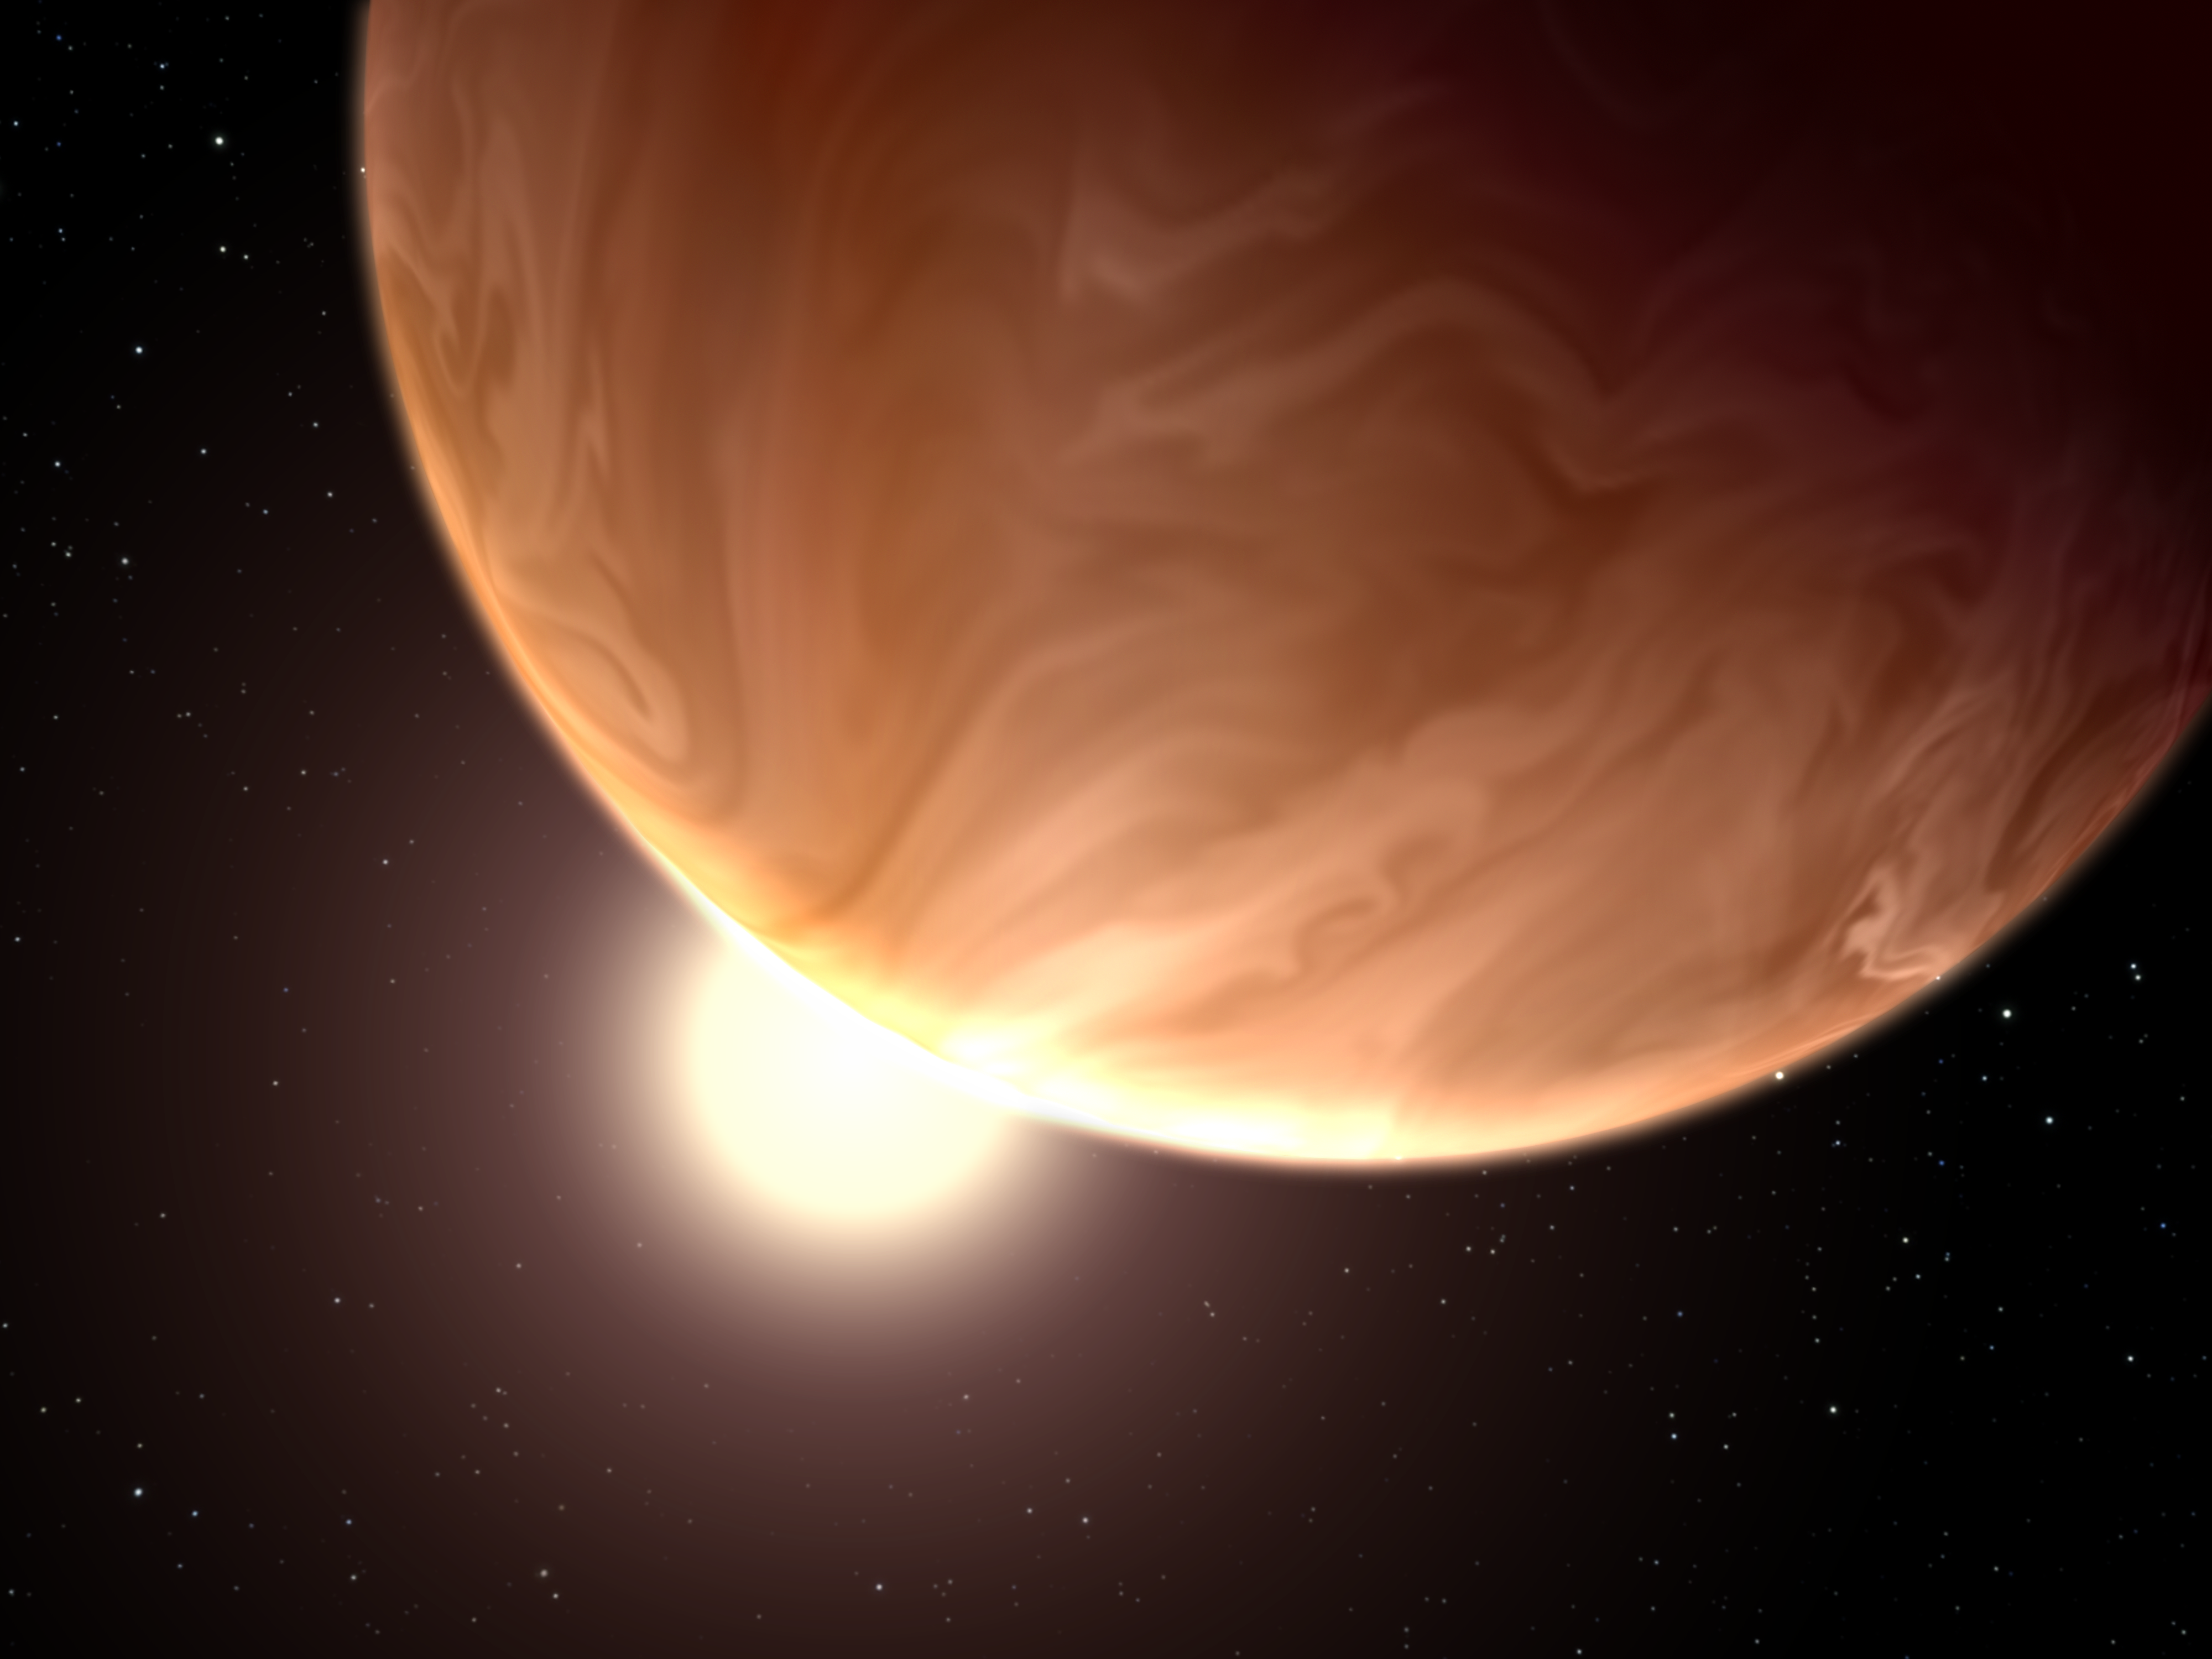

Hubble sees cloudy super-worlds with a chance for more clouds

This is an illustration of the hypothetical appearance of the exoplanet GJ 1214b, which is known as a "super-Earth" because it has a mass slightly more than six times that of Earth. Spectroscopic observations with the NASA/ESA Hubble Space Telescope provide evidence of high clouds blanketing the planet. These clouds hide any information about the composition and behaviour of the world's lower atmosphere and surface. The composition of the clouds is unknown. GJ1214b is located 40 light-years from Earth, in the constellation of Ophiuchus (The Serpent Bearer).

Credit: NASA, ESA, and G. Bacon (STScI) Science Credit: NASA, ESA, L. Kreidberg and J. Bean (University of Chicago), and H. Knutson (California Institute of Technology)